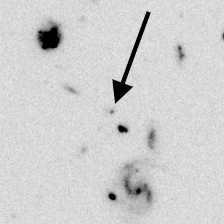

Distant Galaxy in the Hubble Deep Field

Series of four panels that illustrate the distant-galaxy identification technique.

The F300W filter has been used to obtain this image.

Credit: Ken Lanzetta and Amos Yahil (State University of New York at Stony Brook), and NASA/ESA